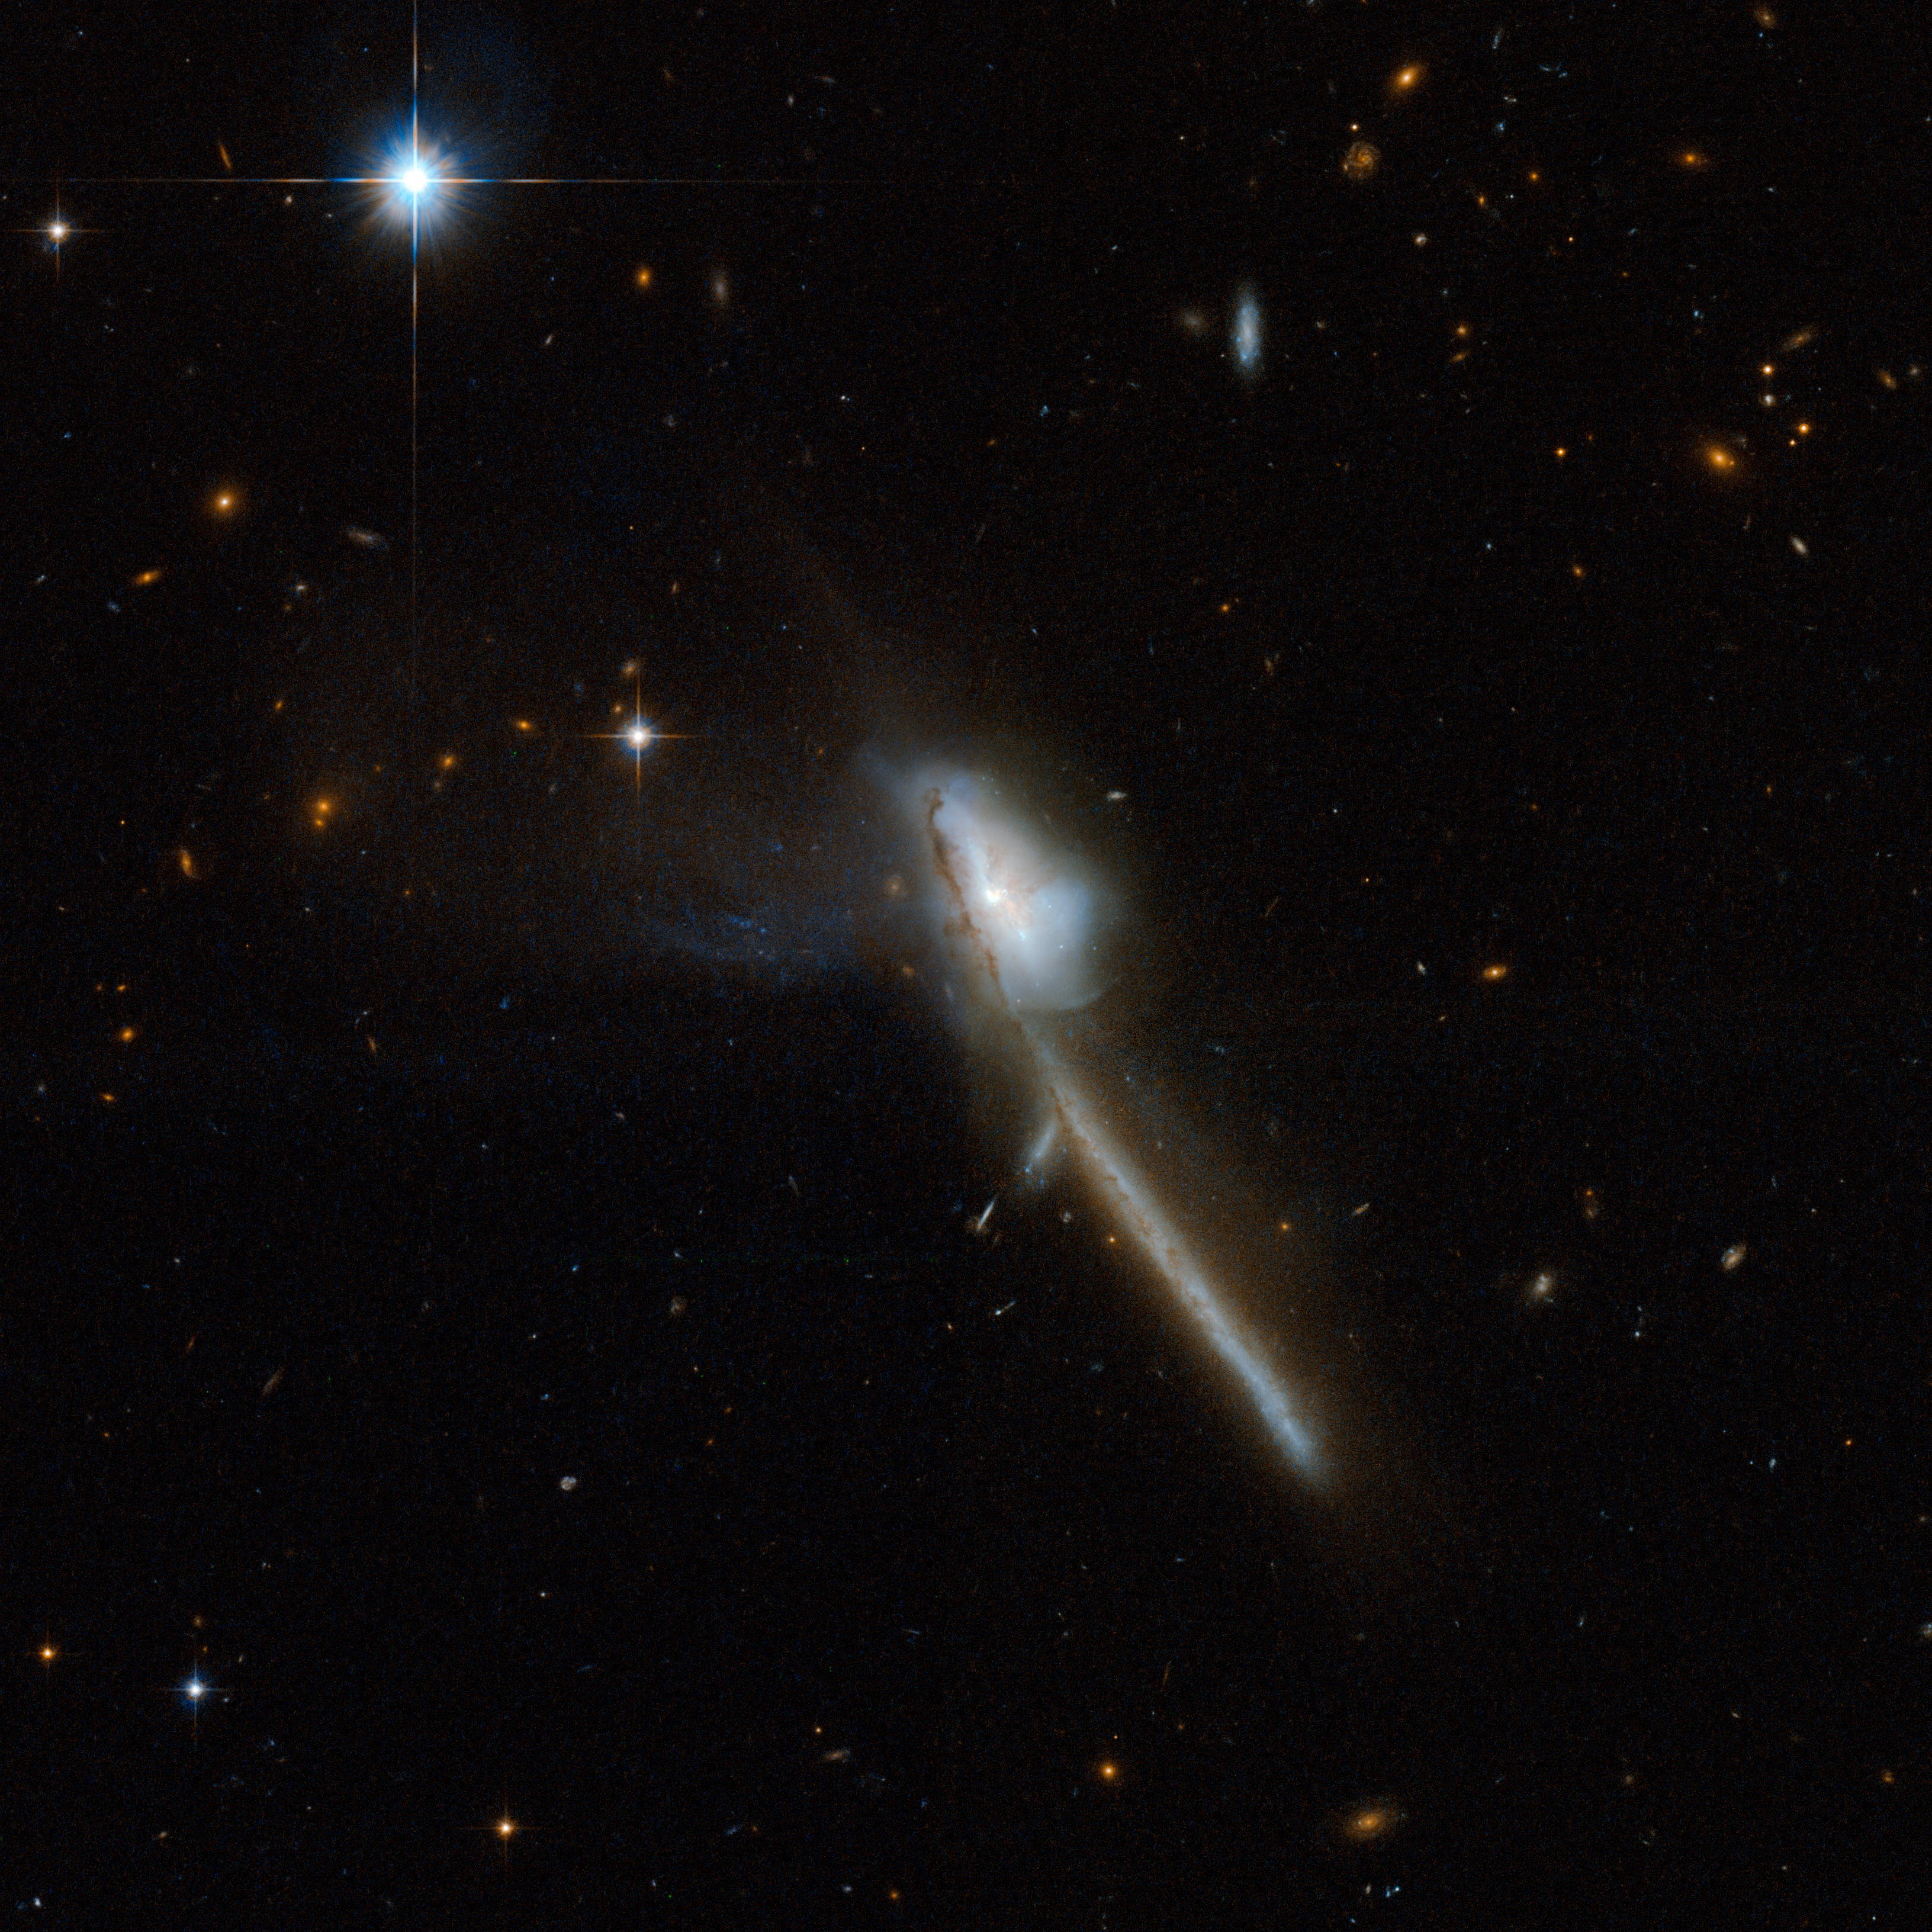

Markarian 273

Markarian 273 is a galaxy with a bizarre structure that somewhat resembles a toothbrush. The Hubble image shows an intricate central region and a striking tail that extends diagonally towards the bottom-right of the image. The tail is about 130,000 light-years long and is strongly indicative of a merger between two galaxies. Markarian 273 has an intense region of starburst, where 60 solar masses of new stars are born each year. Near-infrared observations reveal a nucleus with two components. Markarian 273 is one of the most luminous galaxies when observed in the infrared, and is located 500 million light-years away from Earth.

This image is part of a large collection of 59 images of merging galaxies taken by the Hubble Space Telescope and released on the occasion of its 18th anniversary on 24th April 2008.

Credit: NASA, ESA, the Hubble Heritage Team (STScI/AURA)-ESA/Hubble Collaboration and A. Evans (University of Virginia, Charlottesville/NRAO/Stony Brook University)